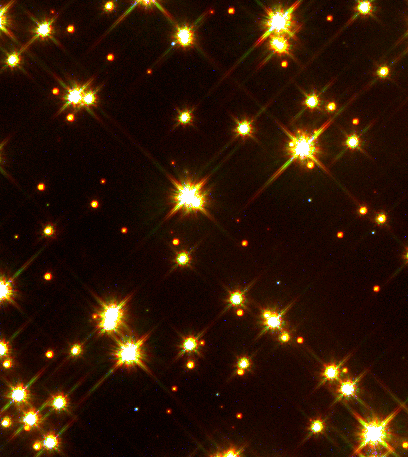

White Dwarf Stars in M4

A Hubble Space Telescope colour image of a small portion of the cluster only 0.63 light-years across reveals eight white dwarf stars among the cluster's much brighter population of yellow sun-like stars and cooler red dwarf stars.

Hubble reveals a total of 75 white dwarfs in one small area within M4, out of the total of about 40, 000 white dwarfs that the cluster is predicted to contain.

Credit: Harvey Richer (University of British Columbia, Vancouver, Canada) and NASA/ESA